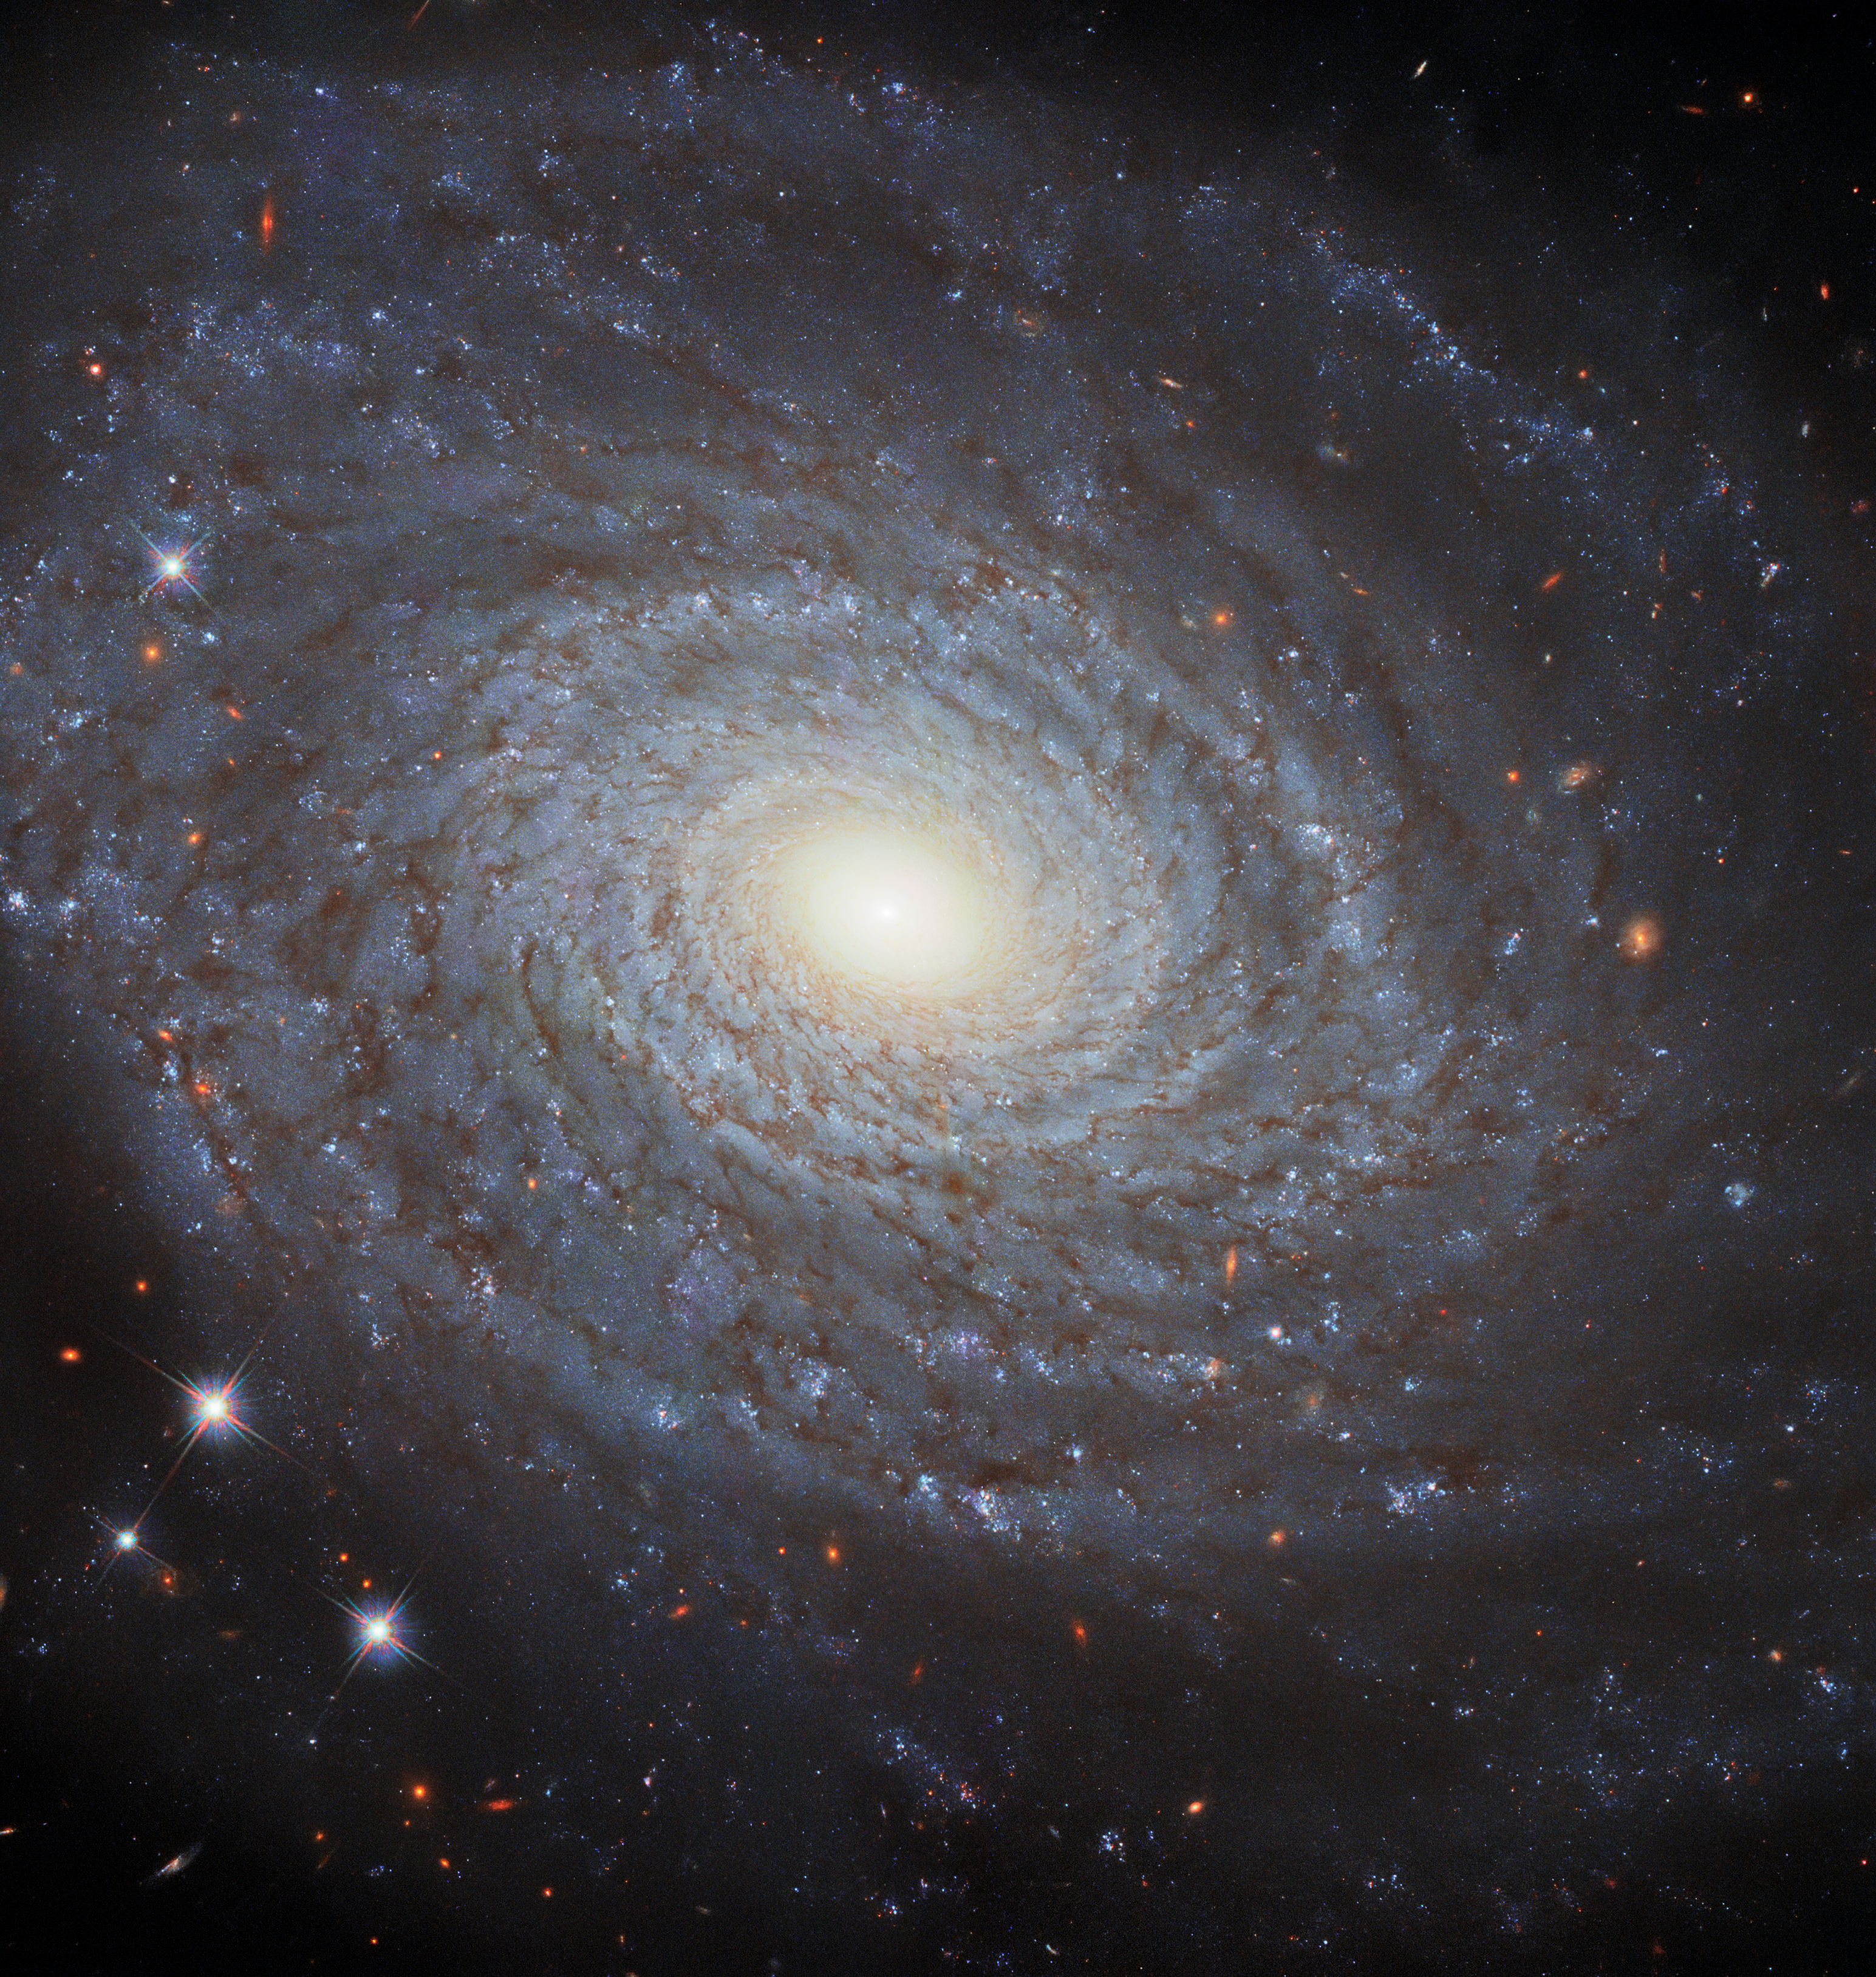

The Eponymous NGC 691

This image features the spiral galaxy NGC 691, imaged in fantastic detail by Hubble’s Wide Field Camera 3 (WFC3). This galaxy is the eponymous member of the NGC 691 galaxy group, a group of gravitationally bound galaxies that lie about 120 million light-years from Earth.

Objects such as NGC 691 are observed by Hubble using a range of filters. Each filter only allows certain wavelengths of light to reach Hubble’s WFC3. The images collected using different filters are then coloured by specialised visual artists who can make informed choices about which colour best corresponds to which filter. By combining the coloured images from individual filters, a full-colour image of the astronomical object can be recreated. In this way, we can get remarkably good insight into the nature and appearance of these objects.

Credit: ESA/Hubble & NASA, A. Riess et al. Acknowledgement: M. Zamani